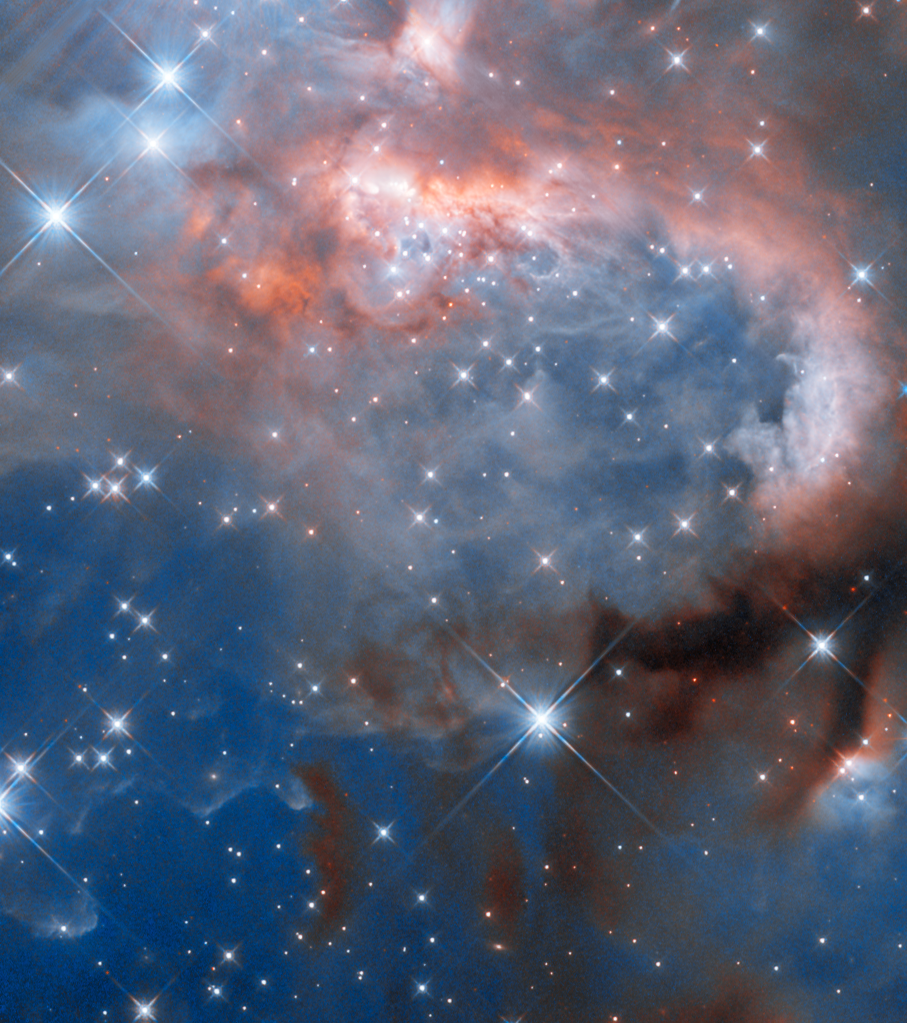

A transformation in progress

A visually striking collection of interstellar gas and dust is the focus of this week's Hubble Picture of the Week. Named RCW 7, the nebula is located just over 5300 light-years from Earth in the constellation Puppis.

Nebulae are areas of space that are rich in the raw material needed to form new stars. Under the influence of gravity, parts of these molecular clouds collapse until they coalesce into protostars, surrounded by spinning discs of leftover gas and dust. In the case of RCW 7, the protostars forming here are particularly massive, giving off strongly ionising radiation and fierce stellar winds that have transformed it into what is known as a H II region.

H II regions are filled with hydrogen ions — where H I refers to a normal hydrogen atom, H II is hydrogen that has lost its electron. The ultraviolet radiation from the massive protostars excites the hydrogen, causing it to emit light and giving this nebula its soft pinkish glow. Here Hubble is studying a particular massive protostellar binary named IRAS 07299-1651, still in its glowing cocoon of gas in the curling clouds towards the top of the nebula. To expose this star and its siblings, this image was captured using the Wide Field Camera 3 in near-infrared light. The massive protostars here are brightest in ultraviolet light, but they emit plenty of infrared light which can pass through much of the gas and dust around them and be seen by Hubble. Many of the other, larger-looking stars in this image are not part of the nebula, but sit between it and our Solar System.

The creation of an H II region marks the beginning of the end for a molecular cloud. Over only a few million years, the radiation and winds from the massive stars gradually disperse the gas — even more so as the most massive stars come to the end of their lives in supernova explosions. Only a fraction of the gas will be incorporated into new stars in this nebula, with the rest being spread throughout the galaxy to eventually form new molecular clouds.

Credit: ESA/Hubble & NASA, J. Tan (Chalmers University & University of Virginia), R. Fedriani (Institute for Astrophysics of Andalusia)